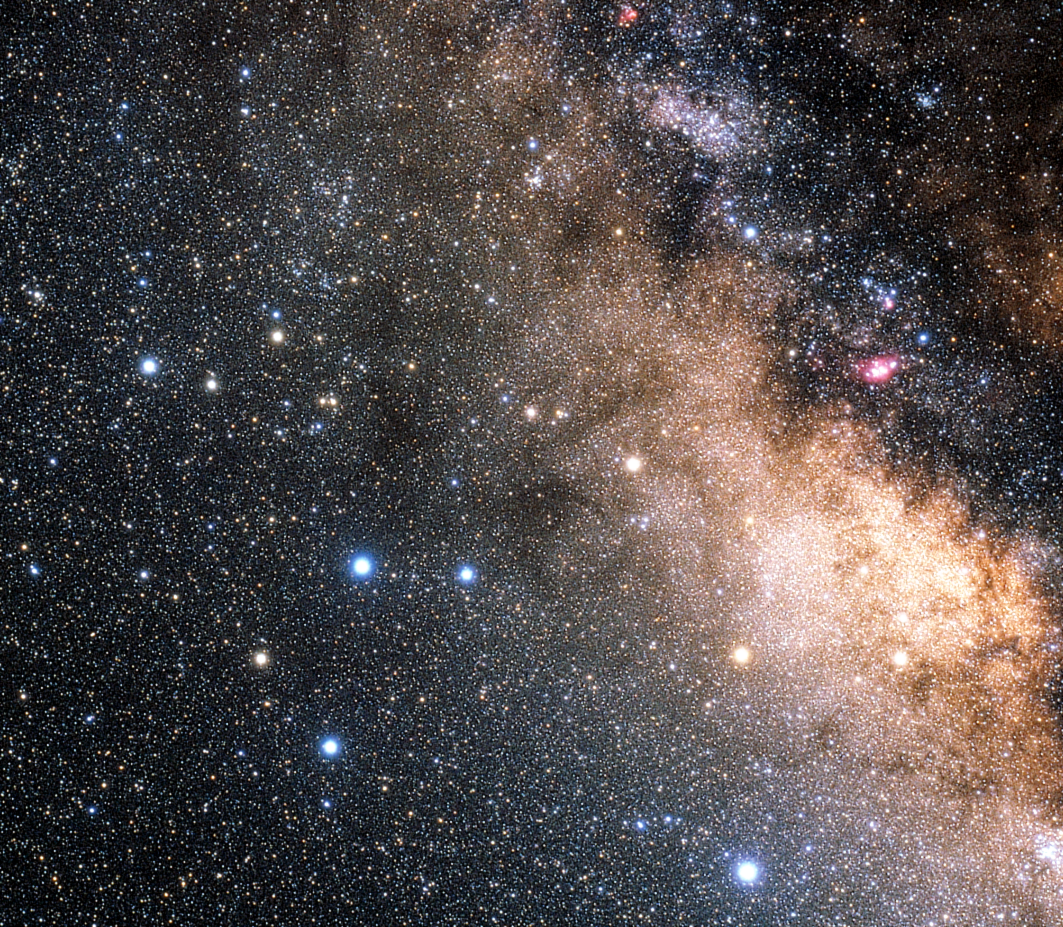

The constellation Sagittarius (ground-based image)

The constellation Sagittarius (the Archer), home to the globular cluster M22 (in the centre), is one of the best known constellations in the sky. Sagittarius contains a large number of famous nebulae and star clusters due to the presence of some of the richest star fields of the Milky Way. The very centre of the Milky Way lies in the direction of Sagittarius. Some of the brighter stars in Sagittarius are known as the Teapot.

Credit: ESA, NASA & Akira Fujii